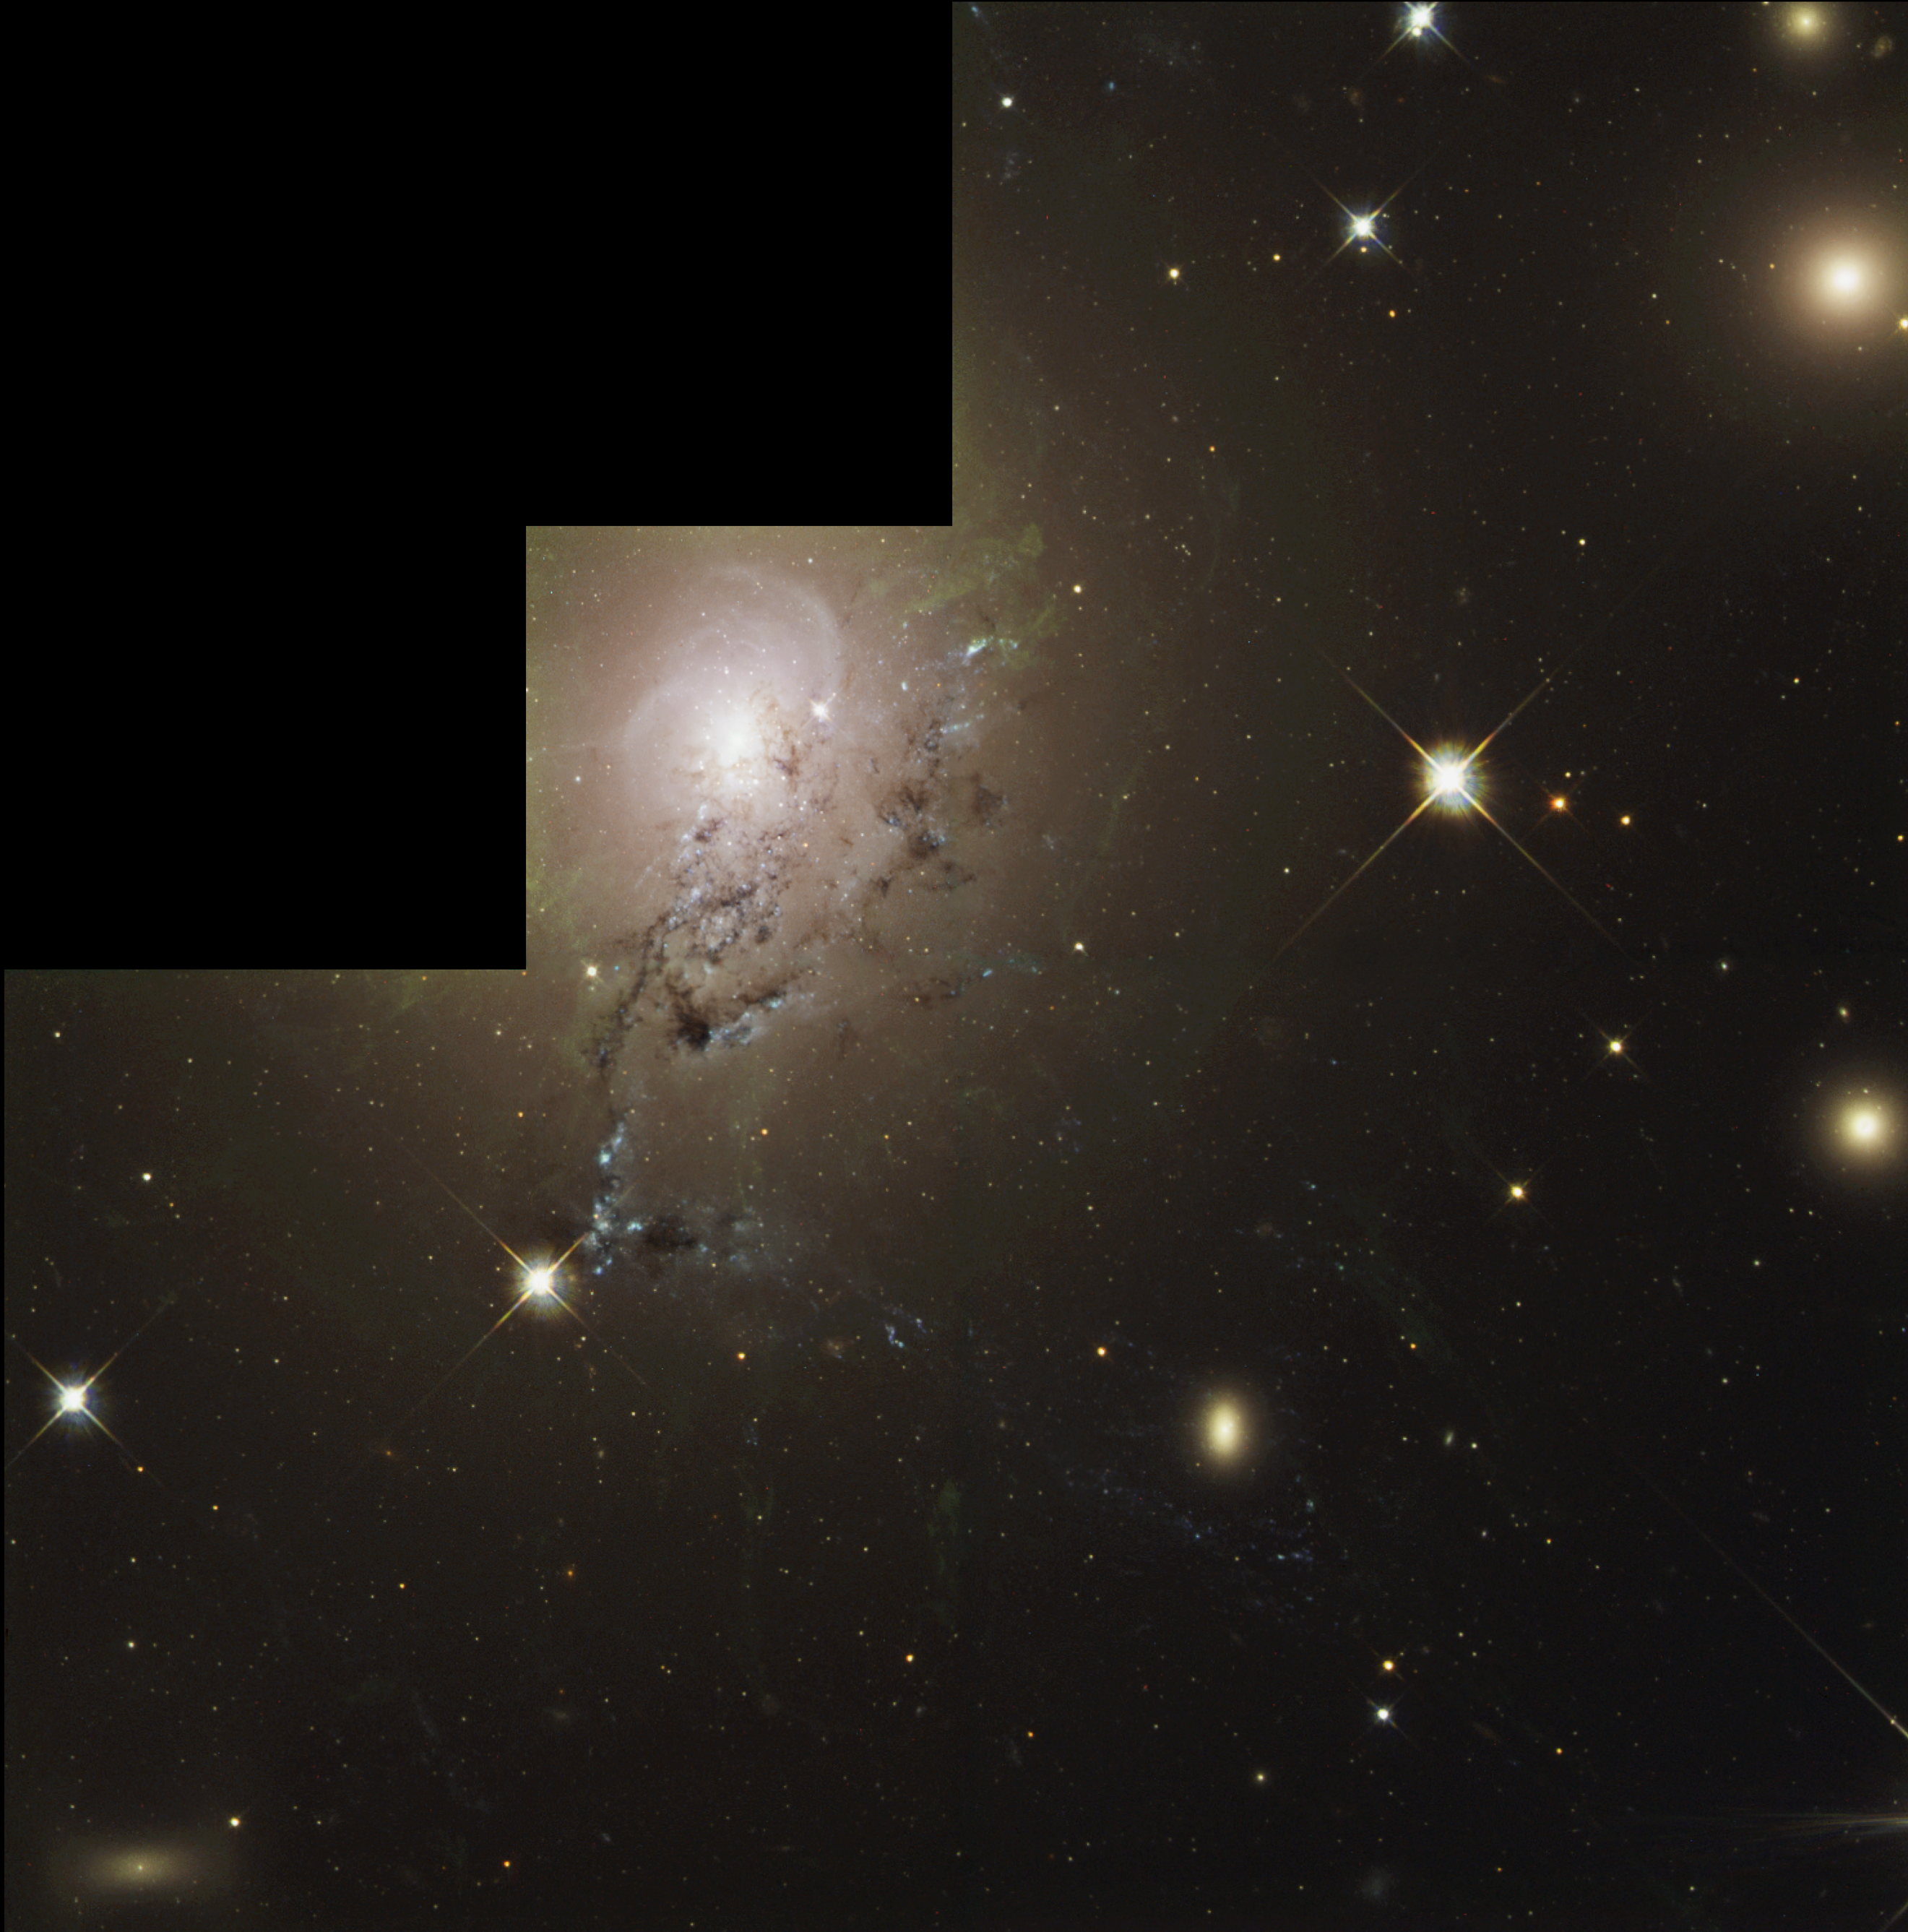

NGC 1275 - Full WFPC2 Mosaic

A dusty spiral galaxy appears to be rotating on edge, like a pinwheel, as it slides through the larger, bright galaxy NGC 1275, in this NASA/ESA Hubble Space Telescope image. These images, taken with Hubble's Wide Field Planetary Camera 2 (WFPC2), show traces of spiral structure accompanied by dramatic dust lanes and bright blue regions that mark areas of active star formation.

Credit: NASA/ESA and The Hubble Heritage Team (STScI/AURA)